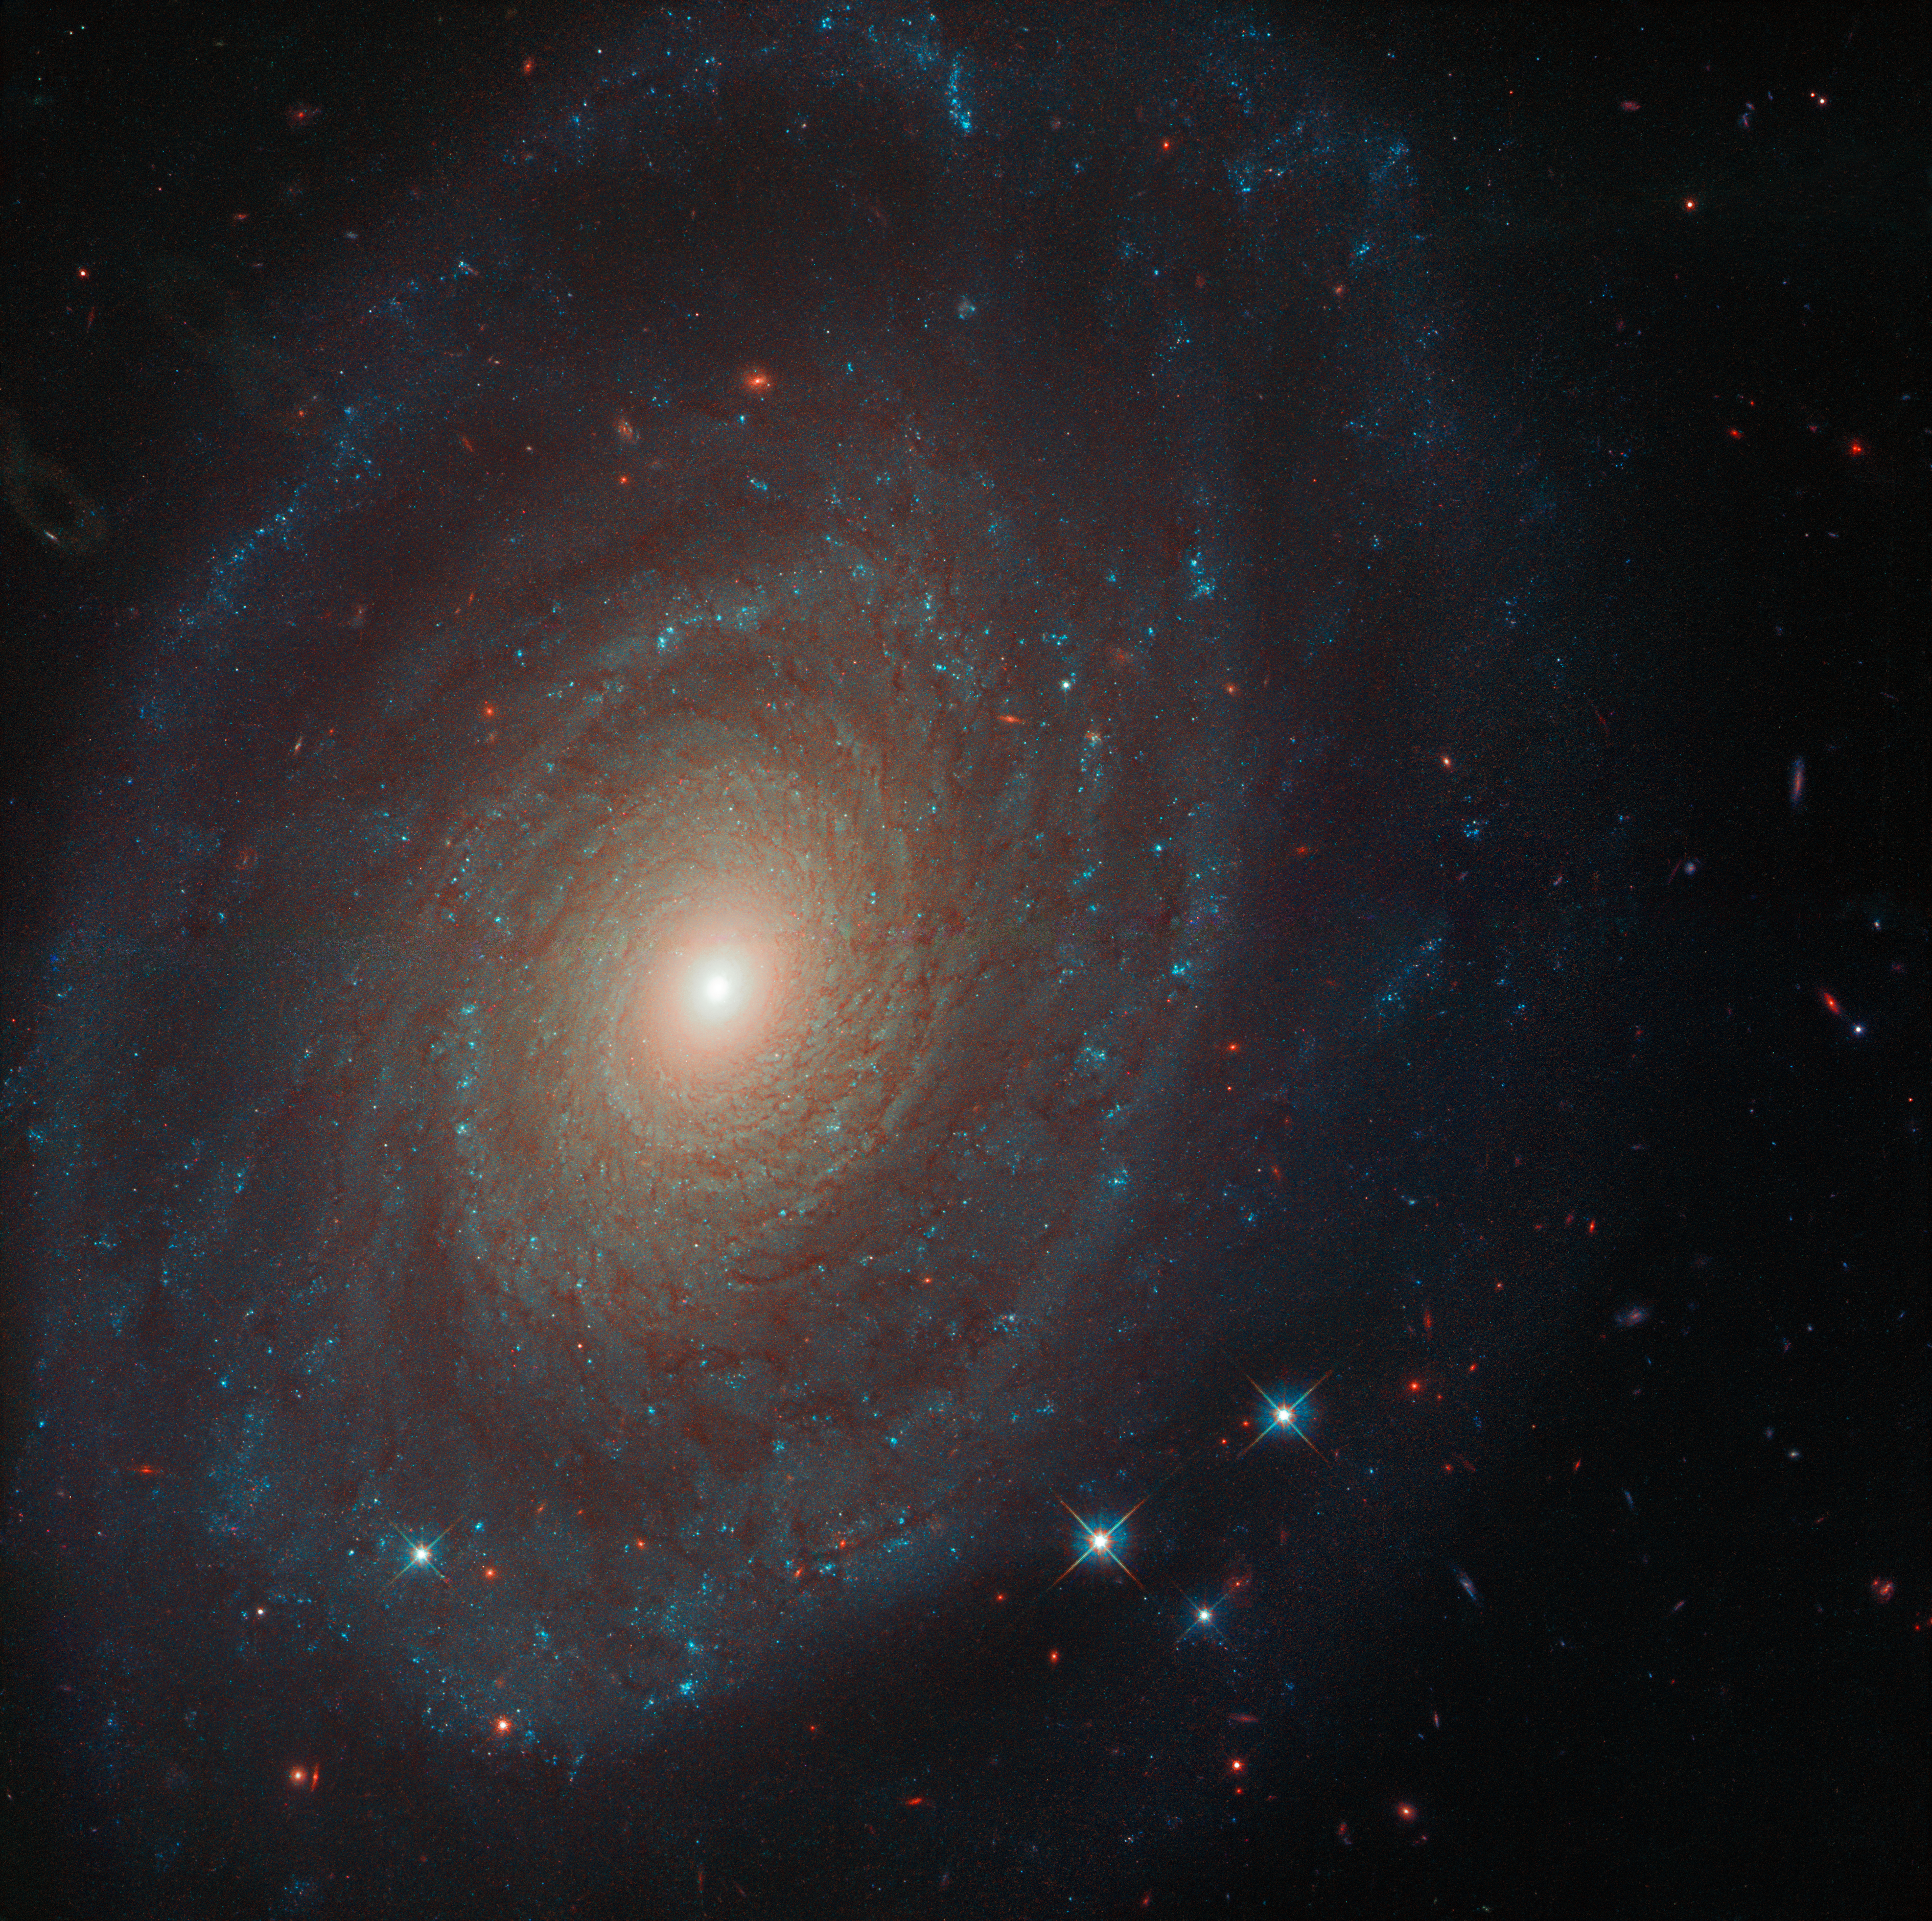

Centuries Before Hubble

This image of an archetypal spiral galaxy was captured by the NASA/ESA Hubble Space Telescope.

The subject of this image is known as NGC 691, and it can be found some 120 million light-years from Earth. This galaxy was one of thousands of objects discovered by astronomer William Herschel during his prolific decades-long career spent hunting for, characterising, and cataloguing a wide array of the galaxies and nebulae visible throughout the night sky — almost 200 years before Hubble was even launched.

The intricate detail visible in this Picture of the Week would likely be extraordinary to Herschel. Hubble was able to capture an impressive level of structure within NGC 691’s layers of stars and spiralling arms — all courtesy of the telescope’s high-resolution Wide Field Camera 3.

Credit: ESA/Hubble & NASA, A. Riess et al.